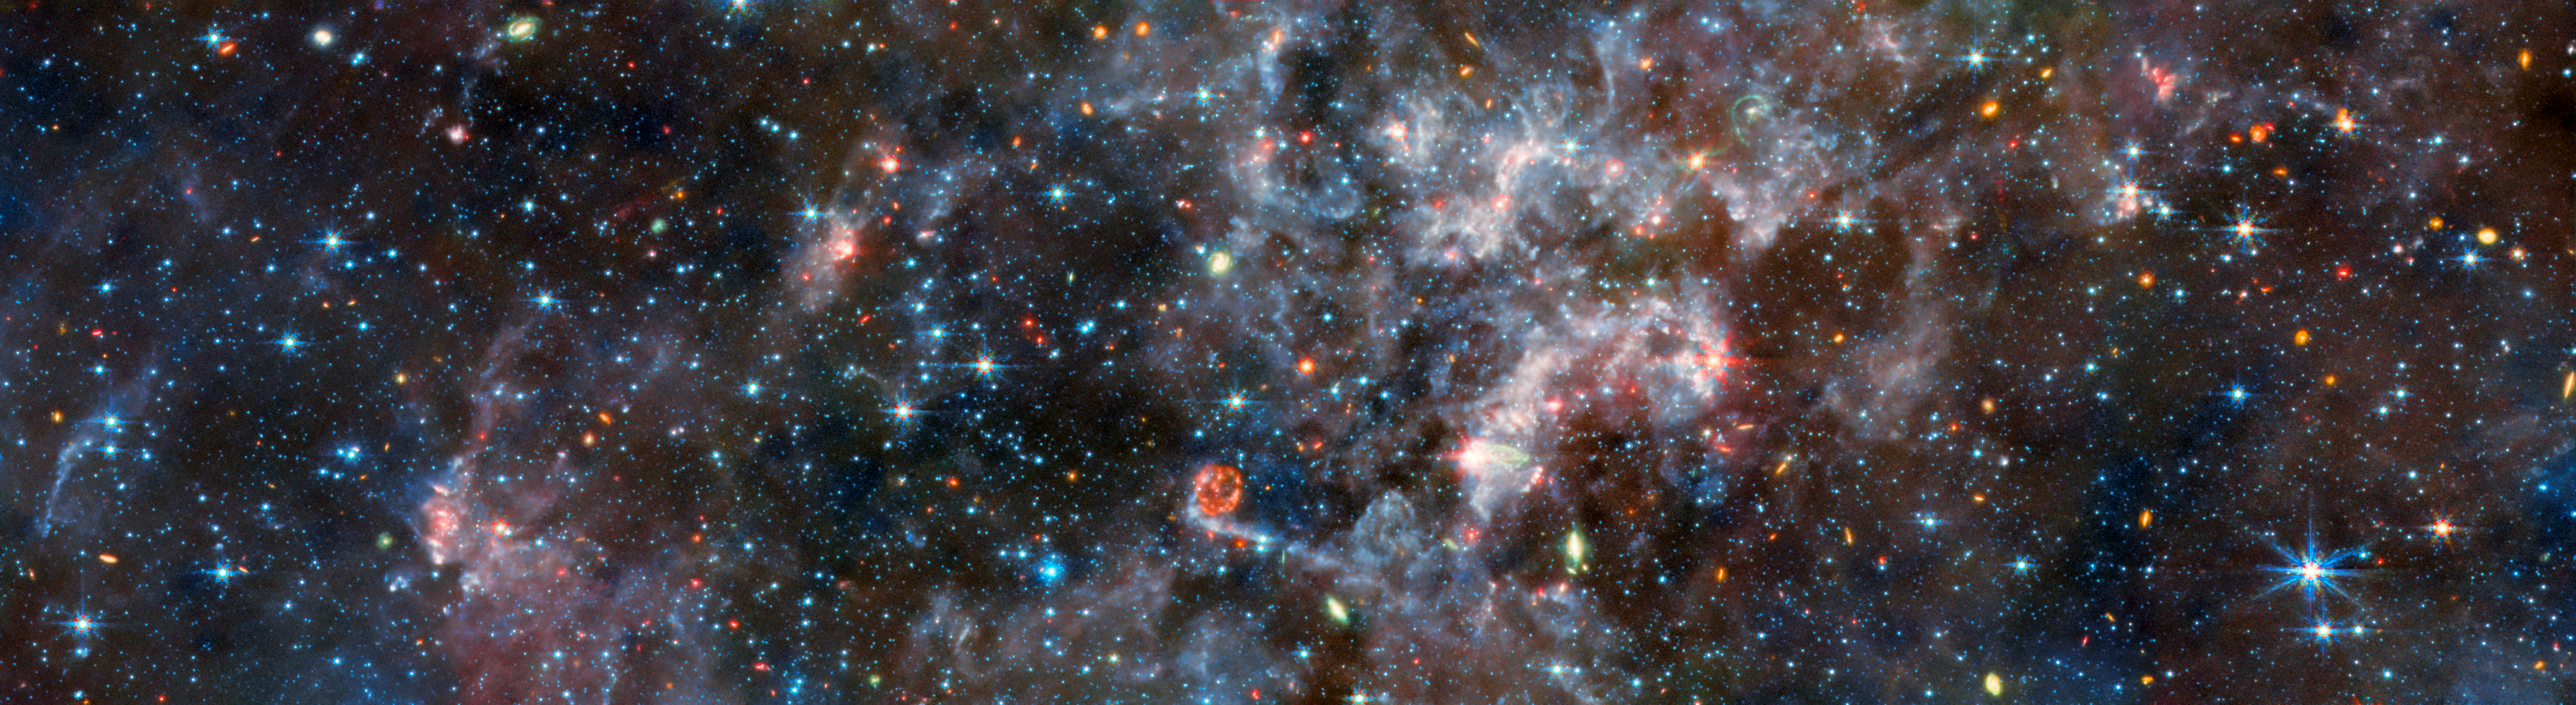

NGC 6822 (MIRI image)

This image shows the irregular galaxy NGC 6822, as observed by the Mid-InfraRed Instrument (MIRI) mounted on the NASA/ESA/CSA James Webb Space Telescope. MIRI probes the mid-infrared, which in this case makes it perfectly suited to observe the dense regions of gas that suffuse this galaxy.

At mid-infrared wavelengths the emission of light by galactic dust is prominent, obscuring the galaxy’s stars which themselves are faint at these longer wavelengths. Brilliant blue gas indicates light emitted by organic compounds called polycyclic aromatic hydrocarbons, which play a critical role in the formation of stars and planets. Cyan marks cooler patches of dust, while warmer dust is more orange.

Distant galaxies far beyond NGC 6822 are displayed in orange. The few galaxies that are relatively closer, meanwhile, are marked in green by their own light-emitting dust, which MIRI can pick out. Bright red and magenta colours indicate active areas of star formation in the galaxy. With so many stars, supernova explosions are routine, and an amazing example of a supernova remnant is visible in this image: a red ring just below the centre.

Credit: ESA/Webb, NASA & CSA, M. Meixner